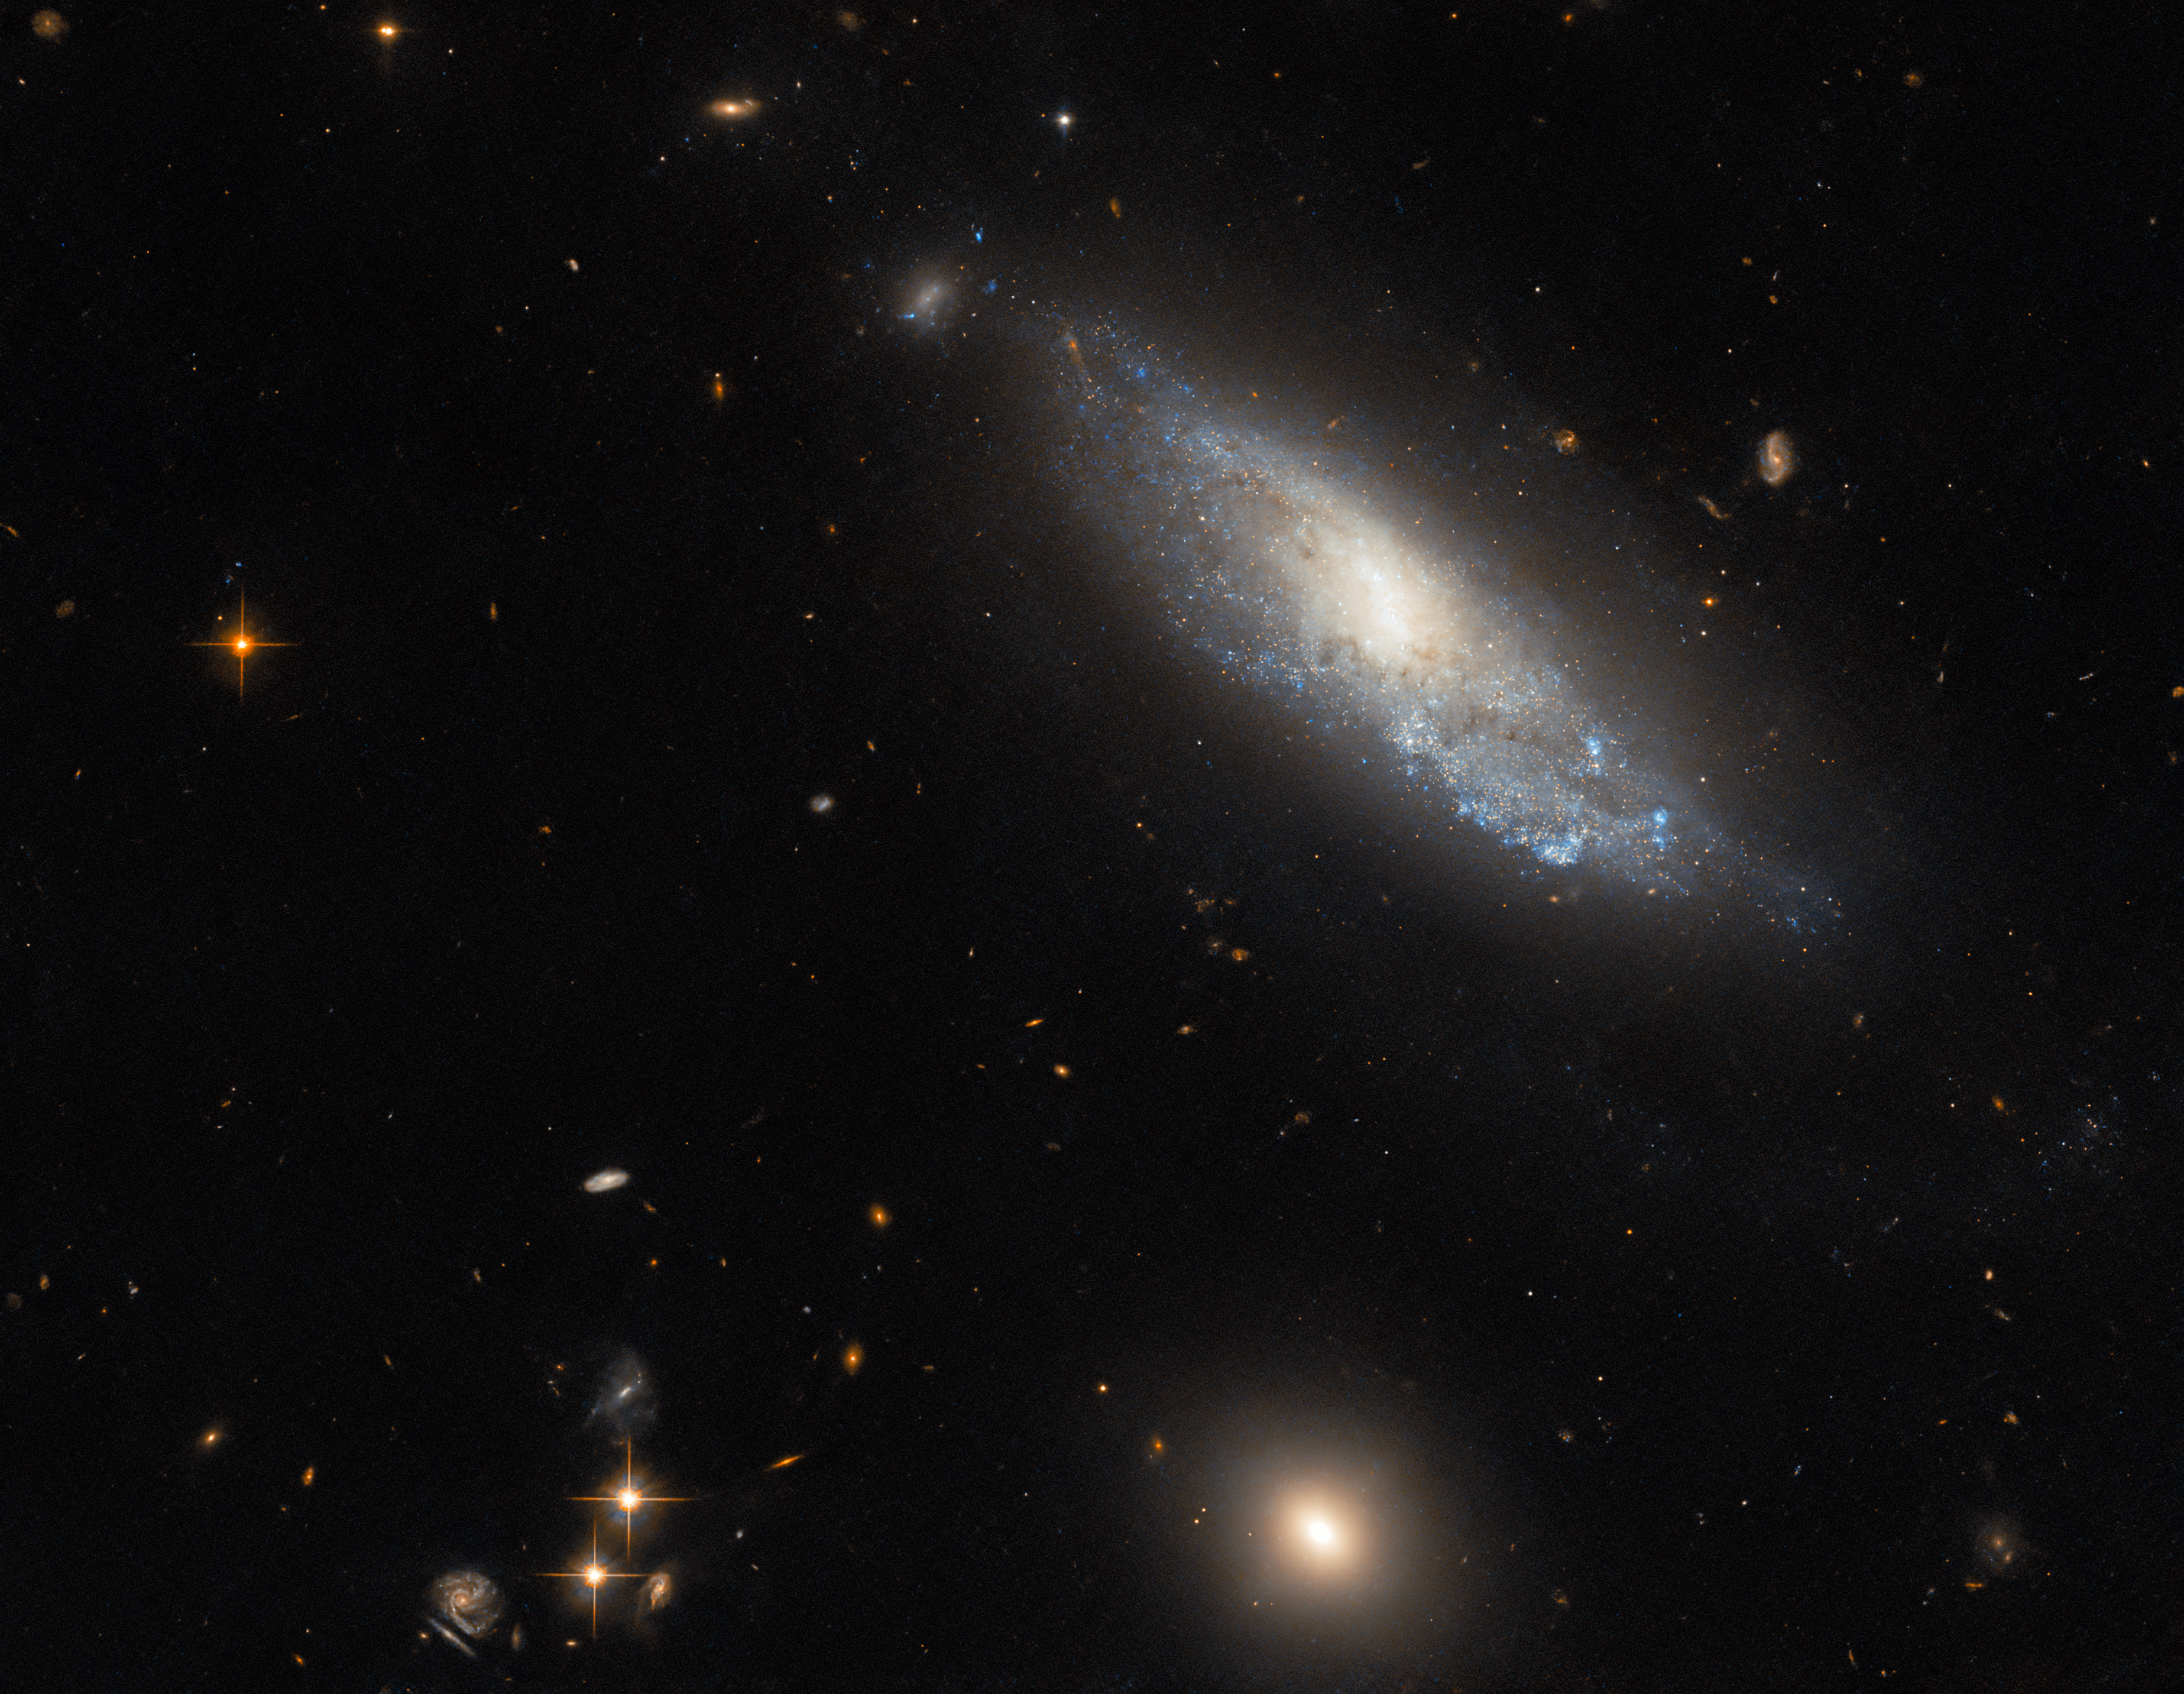

Hubble explores explosive aftermath in NGC 298

The spiral galaxy NGC 298 basks in this image from the NASA/ESA Hubble Space Telescope. NGC 298 lies around 89 million light-years away in the constellation Cetus, and appears isolated in this image — only a handful of distant galaxies and foreground stars accompany the lonely galaxy. While NGC 298 seems peaceful, in 1986 it was host to one of astronomy's most extreme events: a catastrophic stellar explosion known as a Type II supernova.

Hubble’s Advanced Camera for Surveys captured NGC 298 as part of an investigation into the origins of Type II supernovae. All Type II supernovae are produced by the collapse and subsequent explosion of young, massive stars, but they can produce a spectacular diversity of brightnesses and spectral features.

Astronomers suspect that the diversity of this cosmic firework show might be due to gas and dust being stripped from the stars that will eventually produce Type II supernovae. Observing the region surrounding supernova explosions can reveal traces of the progenitor star’s history preserved in this lost mass, as well as revealing any companion stars that survived the supernova. Hubble used the brief periods between scheduled observations to explore the aftermath of a number of Type II supernovae, hoping to piece together the relationship between Type II supernovae and the stellar systems which give rise to them.

Credit: ESA/Hubble & NASA, C. Kilpatrick